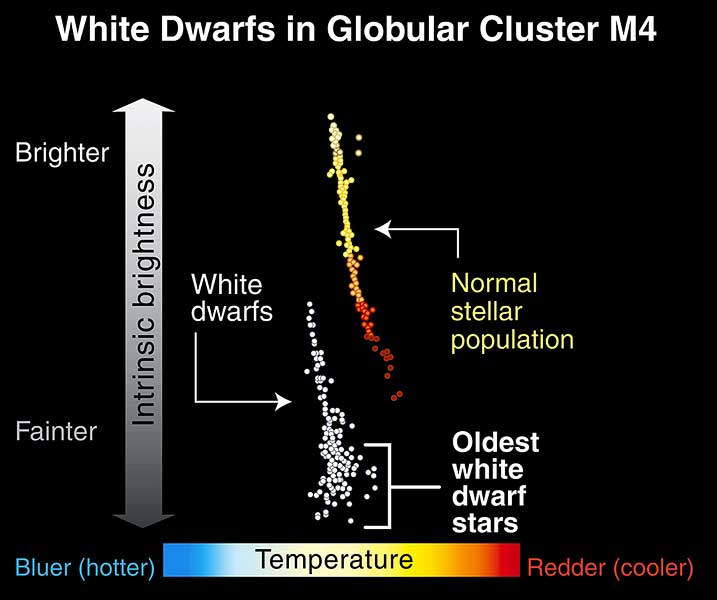

White dwarfs in globular cluster M4

This graph shows the relationship between the temperature and brightness of a sampling of stars in the globular cluster M4. The line of dots at upper right represents main-sequence stars, those whose cores are fusing hydrogen. Normal stars like our Sun fall in the middle of this line.

The white dwarfs are not part of the main-sequence stars because they have used up their hydrogen fuel. These dying stars are fainter and yet hotter than their main-sequence relatives. NASA/ESA Hubble Space Telescope hunted for the faintest and coolest of the white dwarfs [bottom of white dwarf population.]

Credit: NASA/ESA and A. Feild